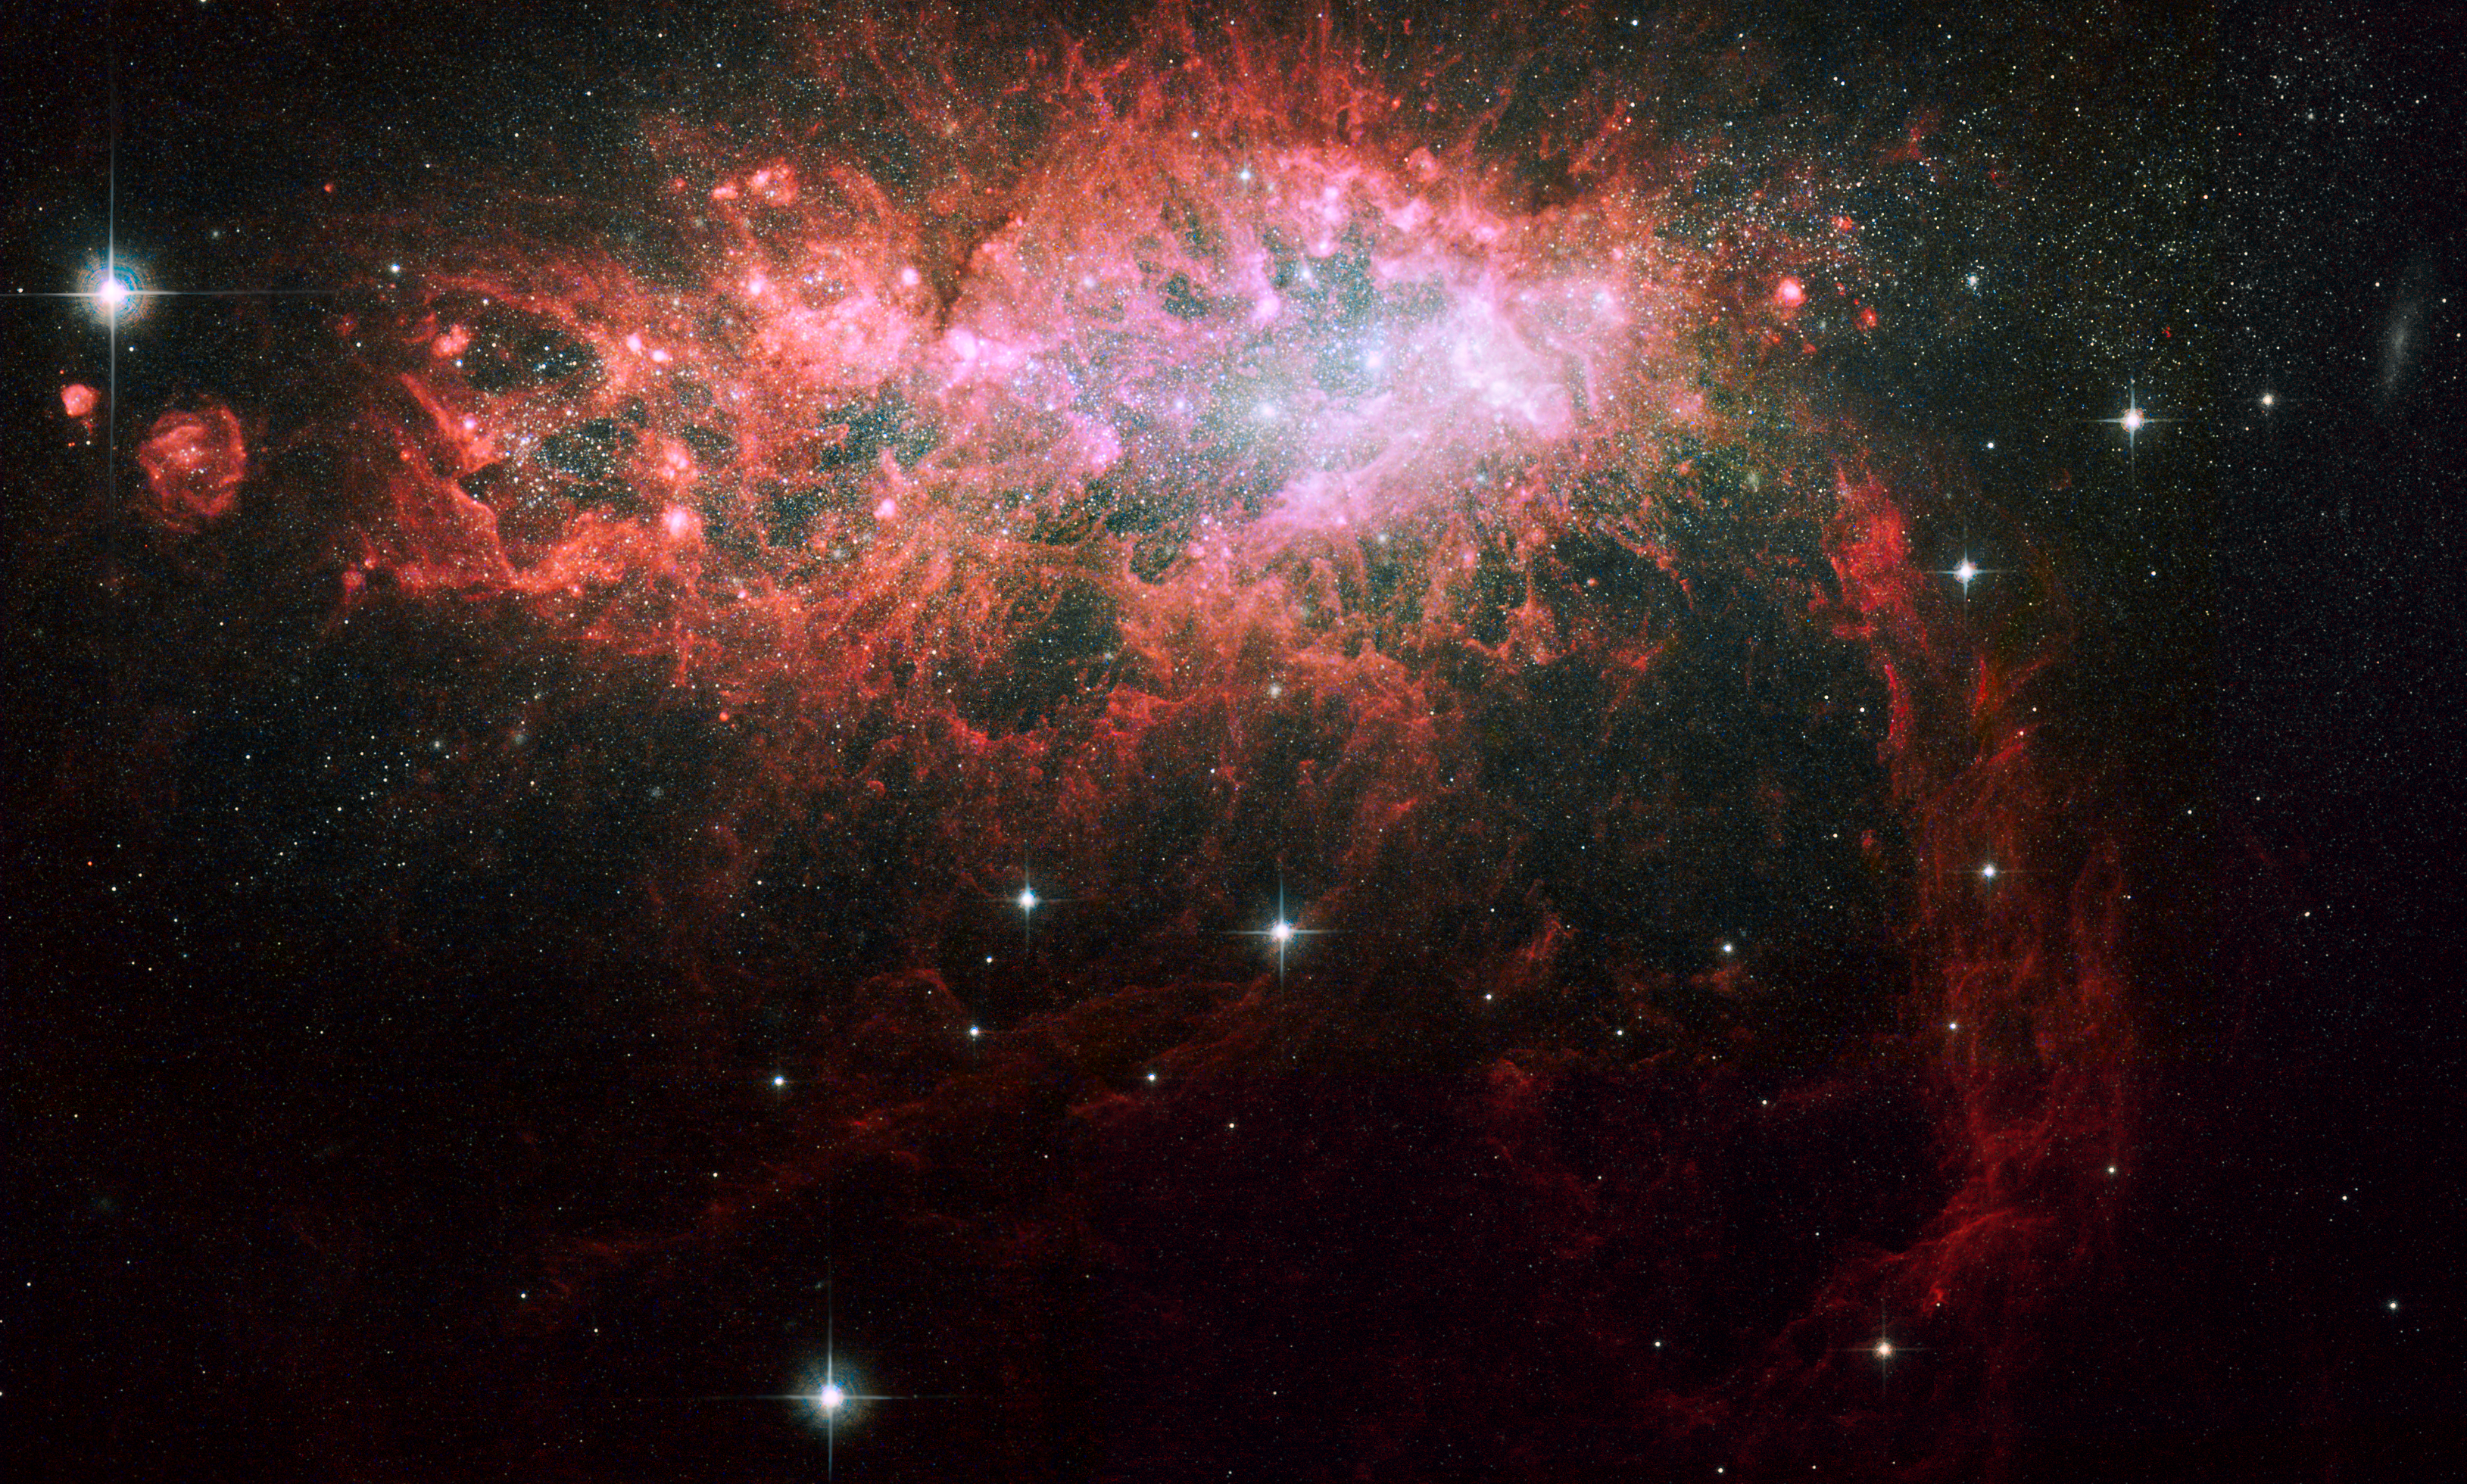

Starburst galaxy NGC 1569

This image taken by NASA/ESA Hubble Space Telescope showcases the brilliant core of one of the most active galaxies in our local neighbourhood. The entire core is 5000 light-years wide.

The galaxy, called NGC 1569, sparkles with the light from millions of newly formed young stars. NGC 1569 is pumping out stars at a rate that is 100 times faster than the rate observed in our Milky Way Galaxy. This frenzied pace has been almost continuous for the past 100 million years.

The core's centrepiece is a grouping of three giant star clusters, each containing more than a million stars. (Two of the clusters are so close they appear as one grouping.) The clusters reside in a large, central cavity. The gas in the cavity has been blown out by the multitude of massive, young stars that already exploded as supernovae. These explosions also triggered a violent flow of gas and particles that is sculpting giant gaseous structures. The sculpted structure at lower right is about 3700 light-years long.

Huge bubbles of gas, such as the two at left, appear like floating islands. The largest bubble is about 378 light-years wide and the smallest 119 light-years wide. They are being illuminated by the radiation from the bright, young stars within them. Some of those stars are peaking through their gaseous cocoons.

The biggest and brightest objects surrounding the core are stars scattered throughout our Milky Way Galaxy. In contrast, the thousands of tiny white dots in the image are stars in the halo of NGC 1569. The galaxy is 11 million light-years from Earth.

A new analysis of NGC 1569 shows that it is one and a half times farther from Earth than astronomers previously thought. The extra distance places the galaxy in the middle of a group of about 10 galaxies centered on the spiral galaxy IC 342. Gravitational interactions among the group's galaxies may be compressing gas in NGC 1569 and igniting the star-birthing frenzy.

Hubble's Wide Field Planetary Camera 2 and Advanced Camera for Surveys made the observations of NGC 1569 in September 1999, November 2006, and January 2007.

Credit for Advanced Camera Data: NASA, ESA, A. Aloisi (STScI/ESA), J. Mack and A. Grocholski (STScI), M. Sirianni (STScI/ESA), R. van der Marel (STScI), L. Angeretti, D. Romano, and M. Tosi (INAF-OAB), and F. Annibali, L. Greggio, and E. Held (INAF-OAP) Credit for Wide Field Planetary Camera 2 Data: NASA, ESA, P. Shopbell (California Institute of Technology), R. Dufour (Rice University), D. Walter (South Carolina State University, Orangeburg), and A. Wilson (University of Maryland, College Park)